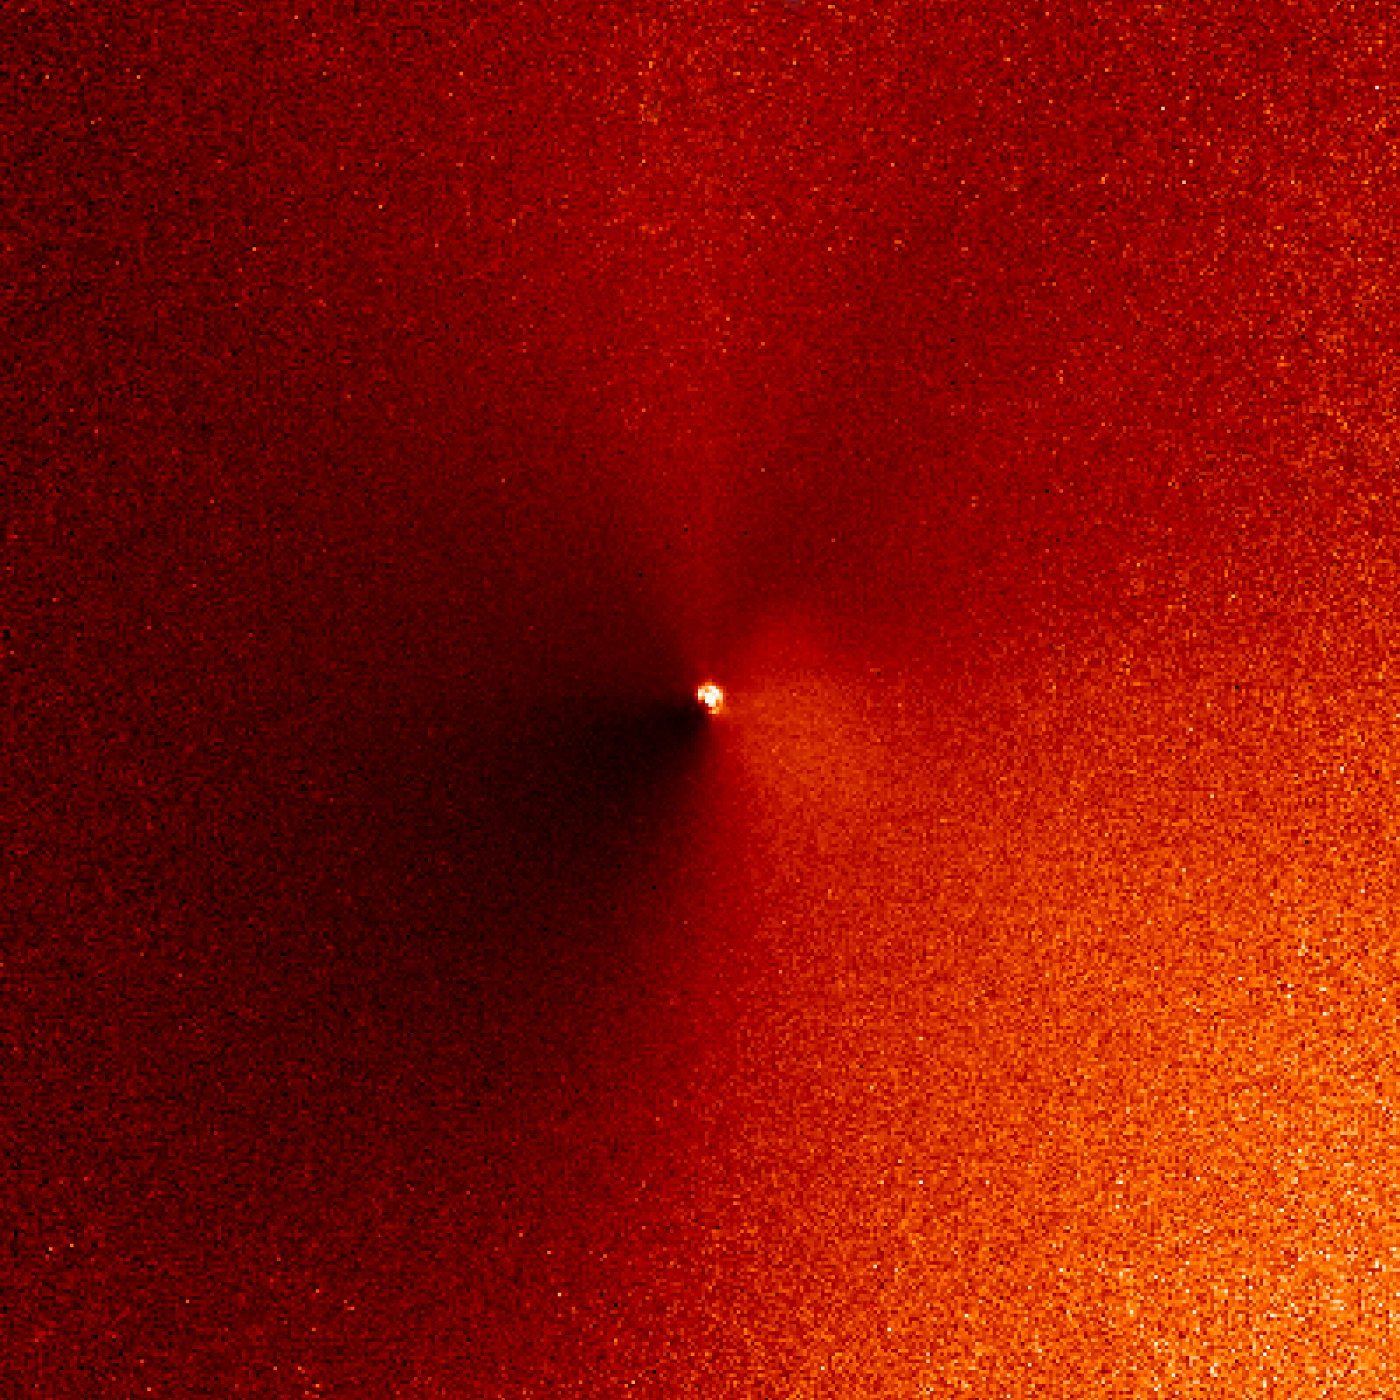

Hubble captures outburst from comet targeted by Deep Impact (07:17 UT image)

In a dress rehearsal for the rendezvous between NASA's Deep Impact spacecraft and comet 9P/Tempel 1, the Hubble Space Telescope captured dramatic images of a new jet of dust streaming from the icy comet.

The images are a reminder that Tempel 1's icy nucleus, roughly the size of central Paris, is dynamic and volatile. Astronomers hope the eruption of dust seen in these observations is a preview of the fireworks that may come 4 July, when a probe from the Deep Impact spacecraft will slam into the comet, possibly blasting off material and giving rise to a similar dust plume.

Credit: NASA, ESA, P. Feldman (Johns Hopkins University), and H. Weaver (Applied Physics Lab)